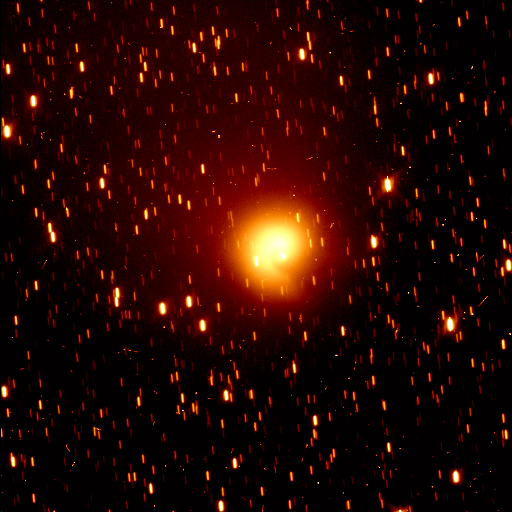

Comet Hale-Bopp

This full-field picture, taken with the Wide Field Planetary Camera 2 (in WF mode), shows the comet against a stellar backdrop in the constellation Sagittarius.

Credit: H.A. Weaver (Applied Research Corp.), P.D. Feldman (The Johns Hopkins University), and NASA/ESA